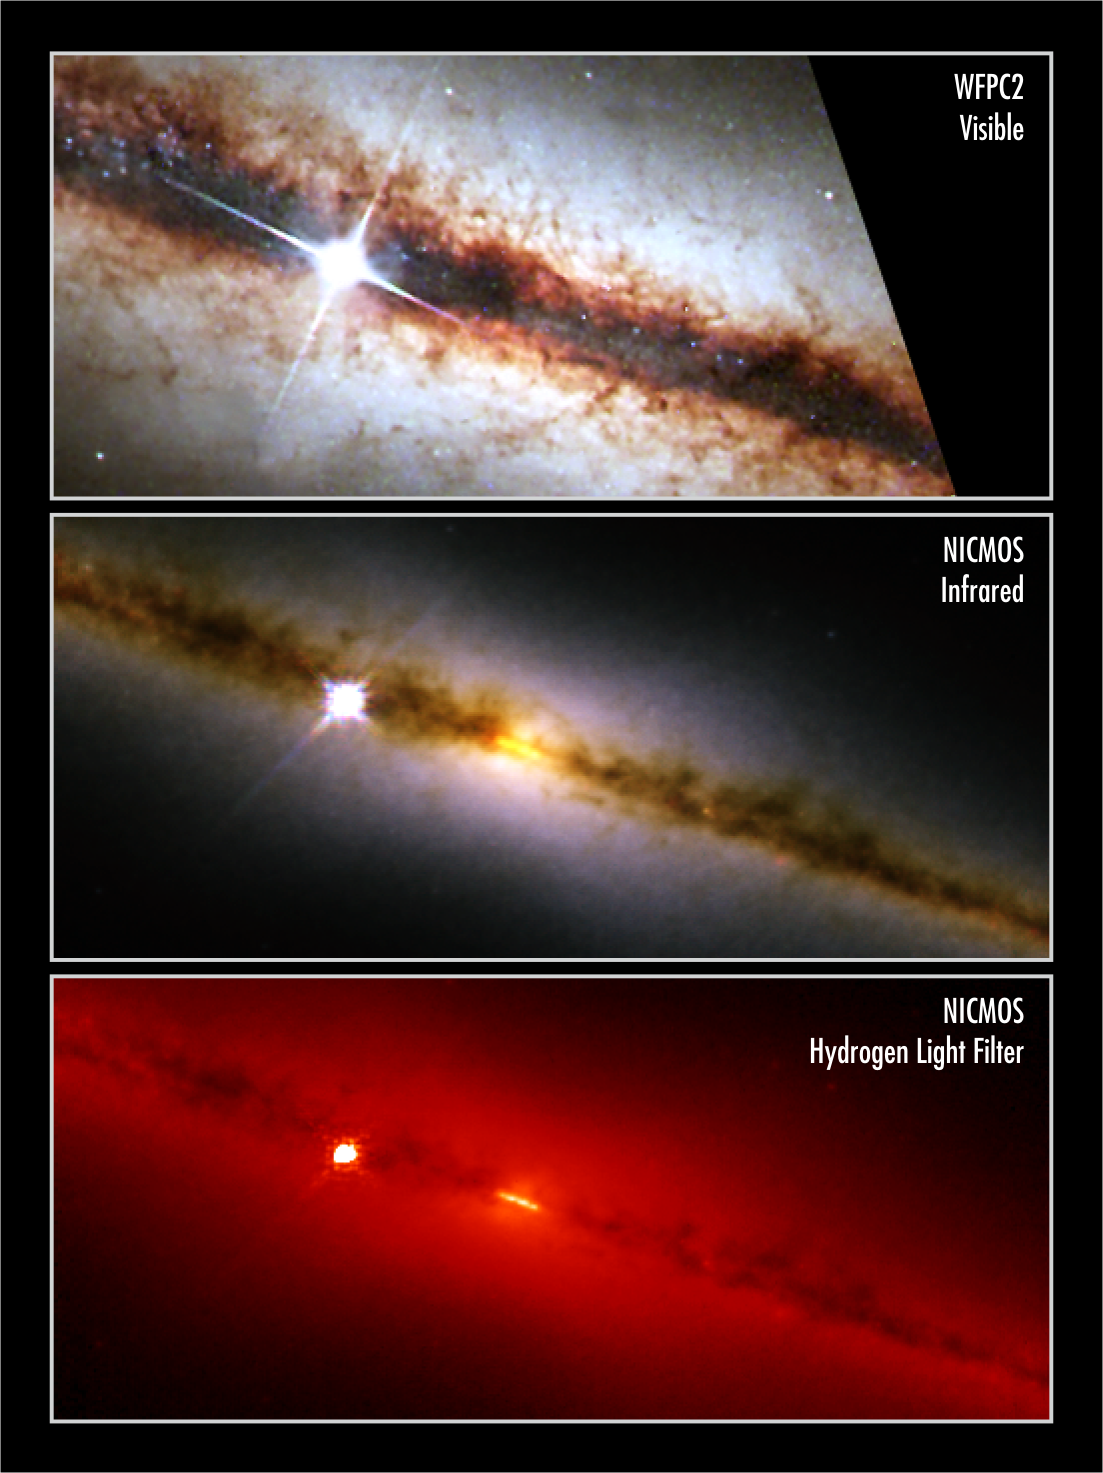

NICMOS finds a golden ring at the heart of a galaxy

The revived Near Infrared Camera and Multi-Object Spectrometer (NICMOS) aboard the NASA/ESA Hubble Space Telescope has penetrated the dusty disc of the 'edge-on' galaxy NGC 4013 and looked right into the galactic core. To the surprise of astronomers, NICMOS found a brilliant band-like structure, that may be a ring of newly formed stars [yellow band in middle photo] seen edge-on. In the visible-light view of the galaxy [top photo], the star-forming ring cannot be seen because it is embedded in dust. The most prominent feature in the visible-light image - taken by the Wide Field and Planetary Camera 2 (WFPC2) - is the thin, dark band of gas and dust, which is about 500 light-years thick. NICMOS enables the Hubble telescope to see near-infrared wavelengths of light, so that it can penetrate the dust that obscures the inner hub of the galaxy. The ring-like structure seen by NICMOS encircles the core and is about 720 light-years wide, which is the typical size of most star-forming rings found in disc galaxies. The small ring is churning out stars at a rapid pace. The Milky Way Galaxy, for example, is more than 10 000 times larger than the ring. If the Milky Way produced stars at the same rate, it would be making 1000 times more stars a year. The human eye cannot see infrared light so colours have been assigned to correspond to near-infrared wavelengths. The blue light represents shorter near-infrared wavelengths and the red light corresponds to longer wavelengths. The ring-like structure is seen more clearly in the photo at bottom. This picture, taken with a filter sensitive to hydrogen, shows the glow of stars and gas. Astronomers used this information to calculate the rate of star formation in the ring-like structure. The extremely bright star near the centre of each picture is a nearby foreground star belonging to our own Milky Way. Rings of developing stars are common in barred spiral galaxies, which have 'bars' of stars and gas slicing across their discs. The bars funnel gas to the galactic cores. However, gravitational disturbances near the cores cause gas to accumulate into a lane or a ring. The gas then condenses to form stars. Because NGC 4013 is seen edge-on, astronomers do not know whether a bar of gas or some other mechanism formed the ring-like structure. NGC 4013, which looks similar to our Milky Way Galaxy, resides in the constellation Ursa Major, 55 million light-years from Earth. The middle picture is a colour composite image that was made by combining photographs taken through J-band, H-band, and Paschen-alpha filters. The bottom picture was taken through the Paschen-alpha filter. The images were taken on 12 May 2002.

Credit: NICMOS images: NASA, ESA, the NICMOS Group (STScI, ESA) and the NICMOS Science Team (Univ. of Arizona). WFPC2 image: NASA, the Hubble Heritage Team (STScI/AURA) and ESA.